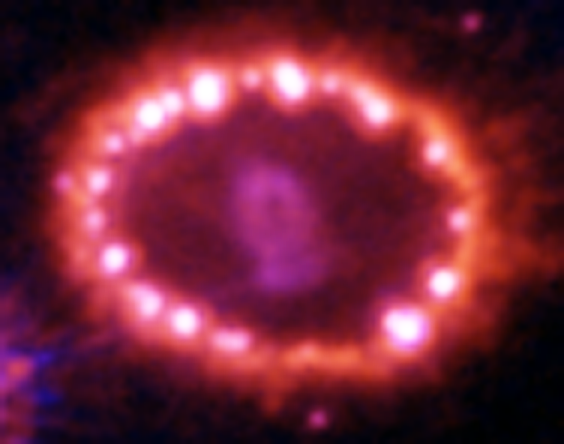

Hubble Supernova 1987A Scrapbook (1994-2003) - Image 12

in 1987, astronomers spotted the brightest stellar explosion ever seen since the one observed by Johannes Kepler over 400 years ago. Called SN 1987A, the titanic supernova explosion blazed with the power of 100,000,000 suns for several months following its discovery on Feb. 23 of that year. Although the supernova itself is over a million times fainter than when it was first discovered, a new light show in the space surrounding it is just beginning.

Credit: NASA/ESA, P. Challis, R. Kirshner (Harvard-Smithsonian Center for Astrophysics) and B. Sugerman (STScI)